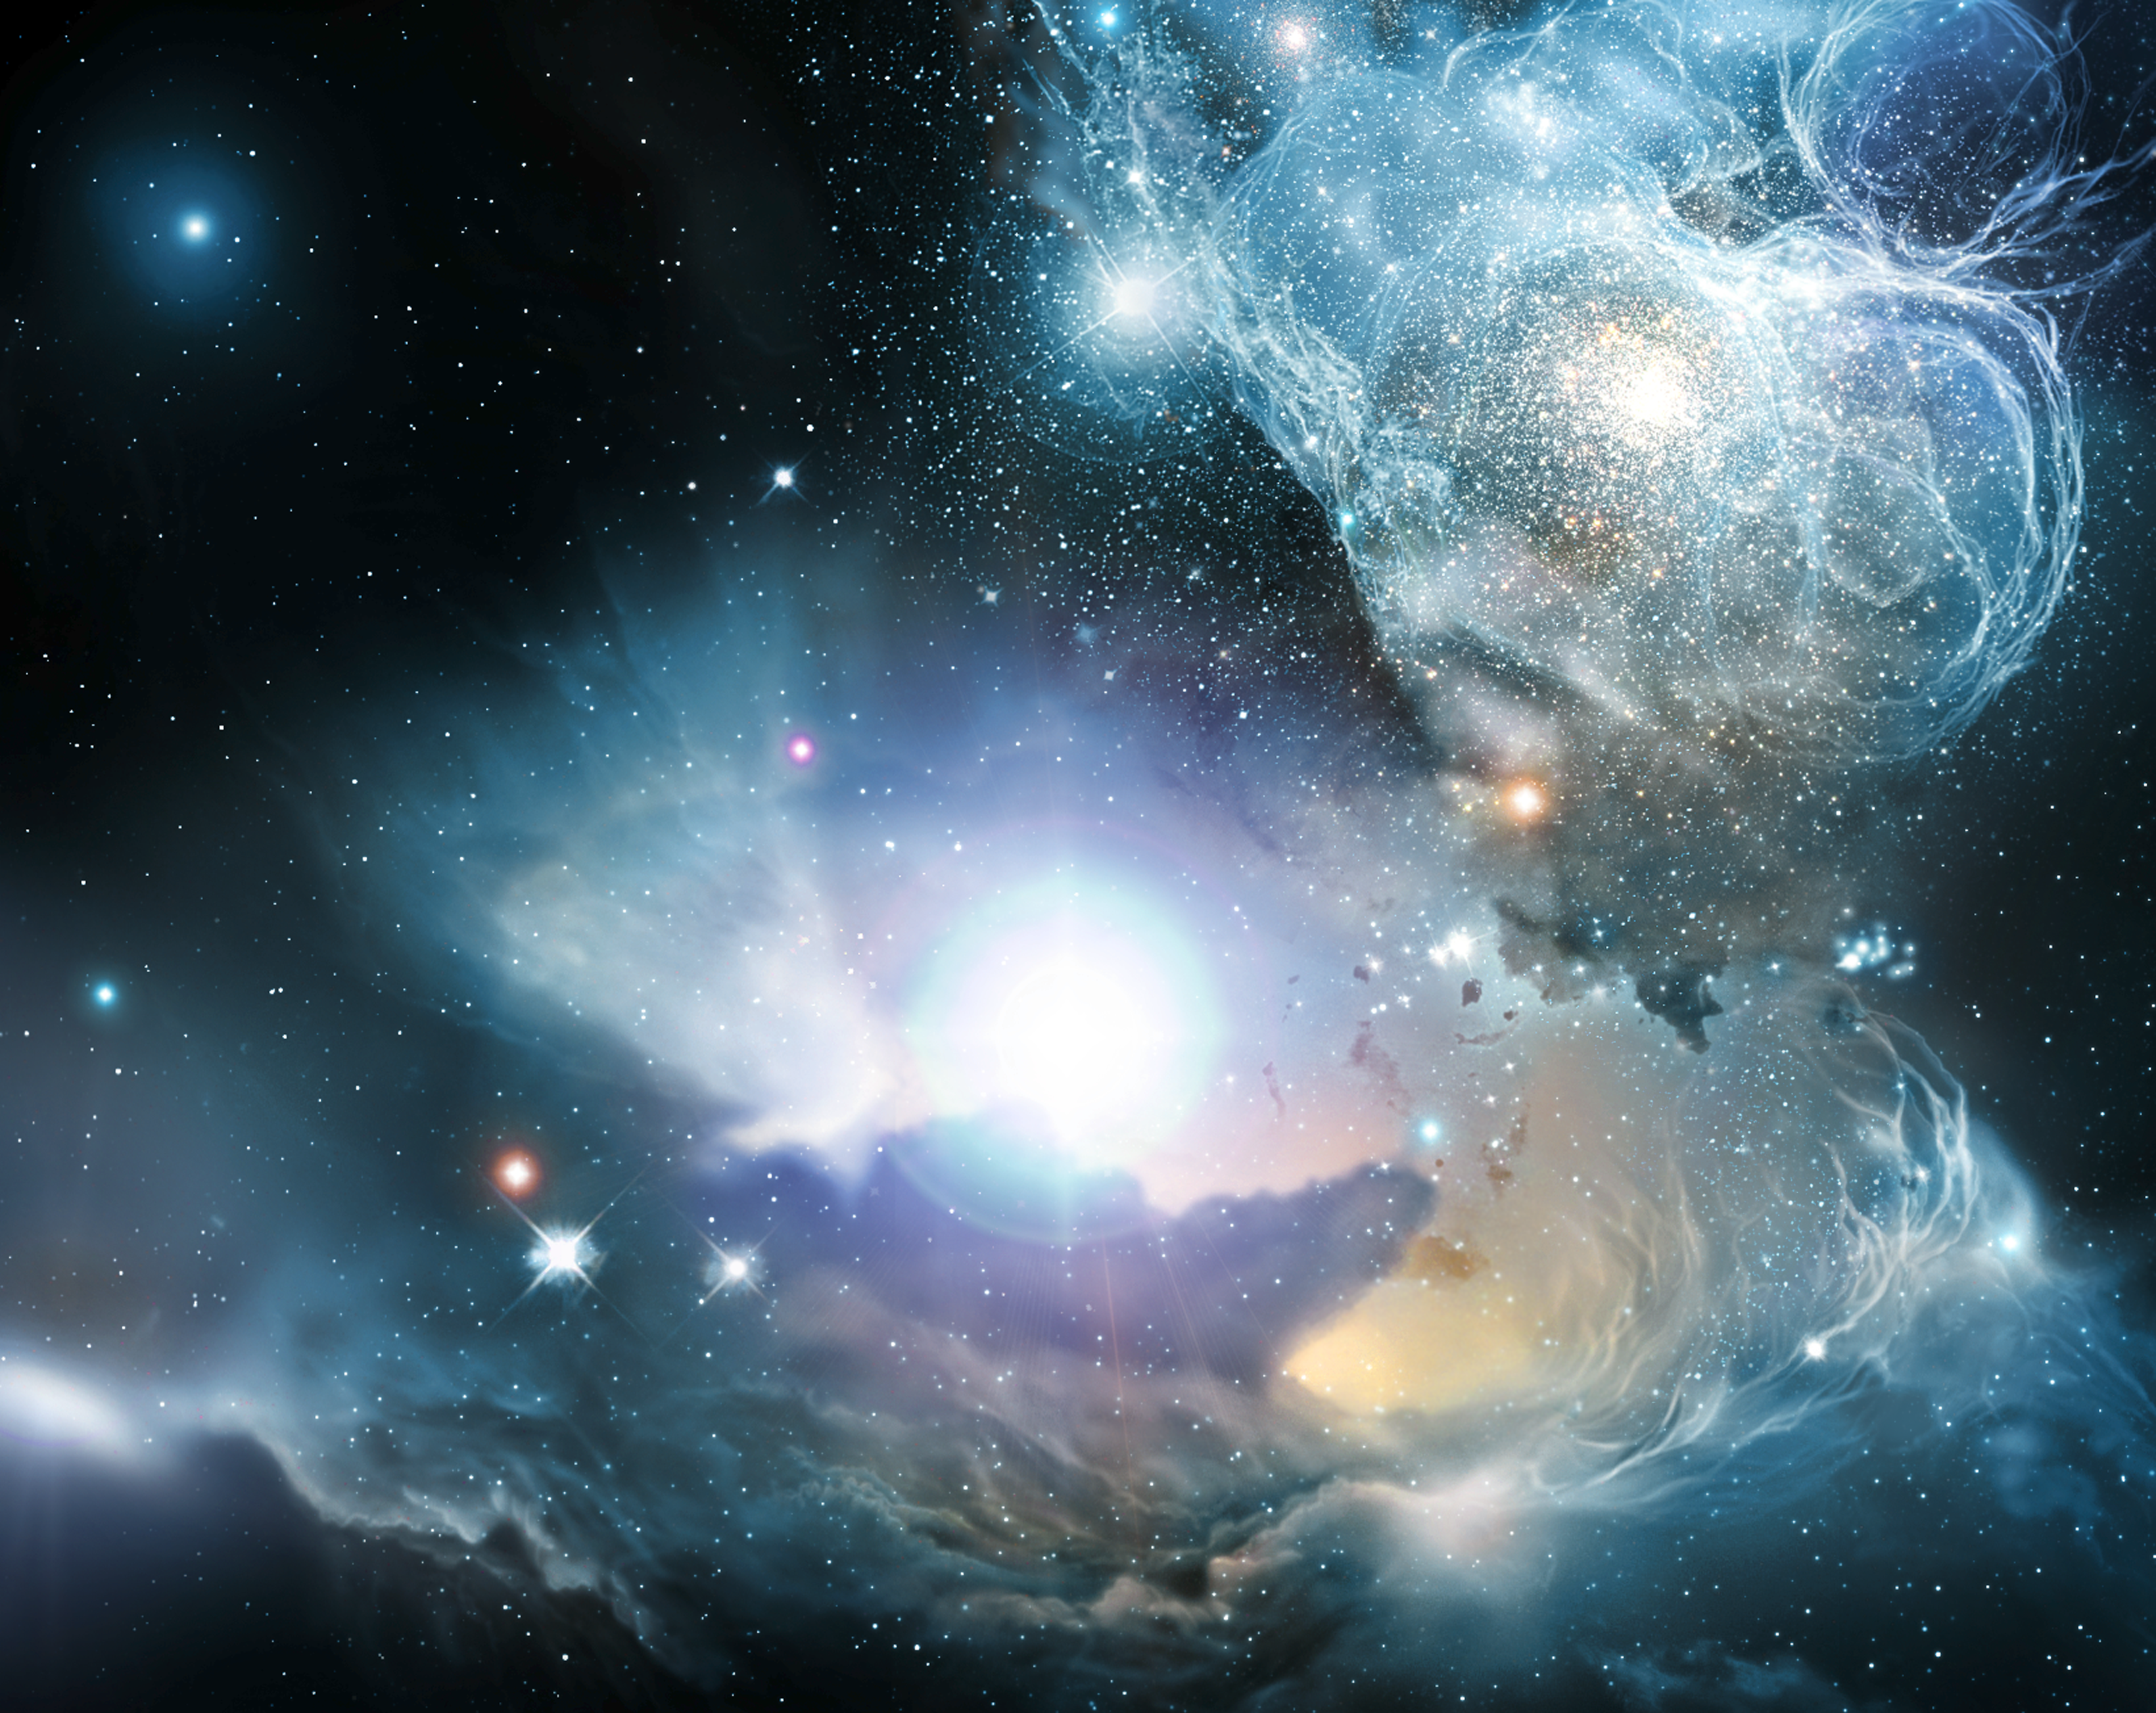

Finding the ashes of the first stars [artist's impression]

Artist's impression of a quasar located in a primeval galaxy (or protogalaxy) a few hundred million years after the Big Bang. Astronomers used the NASA/ESA Hubble Space Telescope to discover substantial amount of iron in three such quasars. This is the first time that anyone has found elements believed to have been created exclusively by the first generation of stars. Information about the very first generation of stars has been one of the Universe's best-kept secrets. When the first stars ended their lives as supernovae, the explosions expelled gas into space. These 'ashes' contained heavier elements such as oxygen, carbon, silicon, and iron created in the nuclear furnaces within the centres of stars. This new discovery allows astronomers to construct a revised timescale for the history of the Universe. About 13.7 thousand million years ago, the Universe is created in the Big Bang. In this cataclysmic hot explosion, hydrogen and helium are almost the only substances present. As the gases cool, the Universe becomes transparent and the gases start to gather. After 200 million years, the first generation of stars form. About 500 to 800 million years later, these first stars explode as supernovae, dispersing elements like iron and other elements into the surroundings. The new observations suggest that the first stars formed before the supermassive black holes that power the quasar engines in the centres of galaxies. The light from the quasars has travelled for 12.8 thousand million years before reaching Hubble and had left the quasars only 900 million years after the Big Bang.

Credit: European Space Agency and Wolfram Freudling (Space Telescope-European Coordinating Facility/European Southern Observatory, Germany)